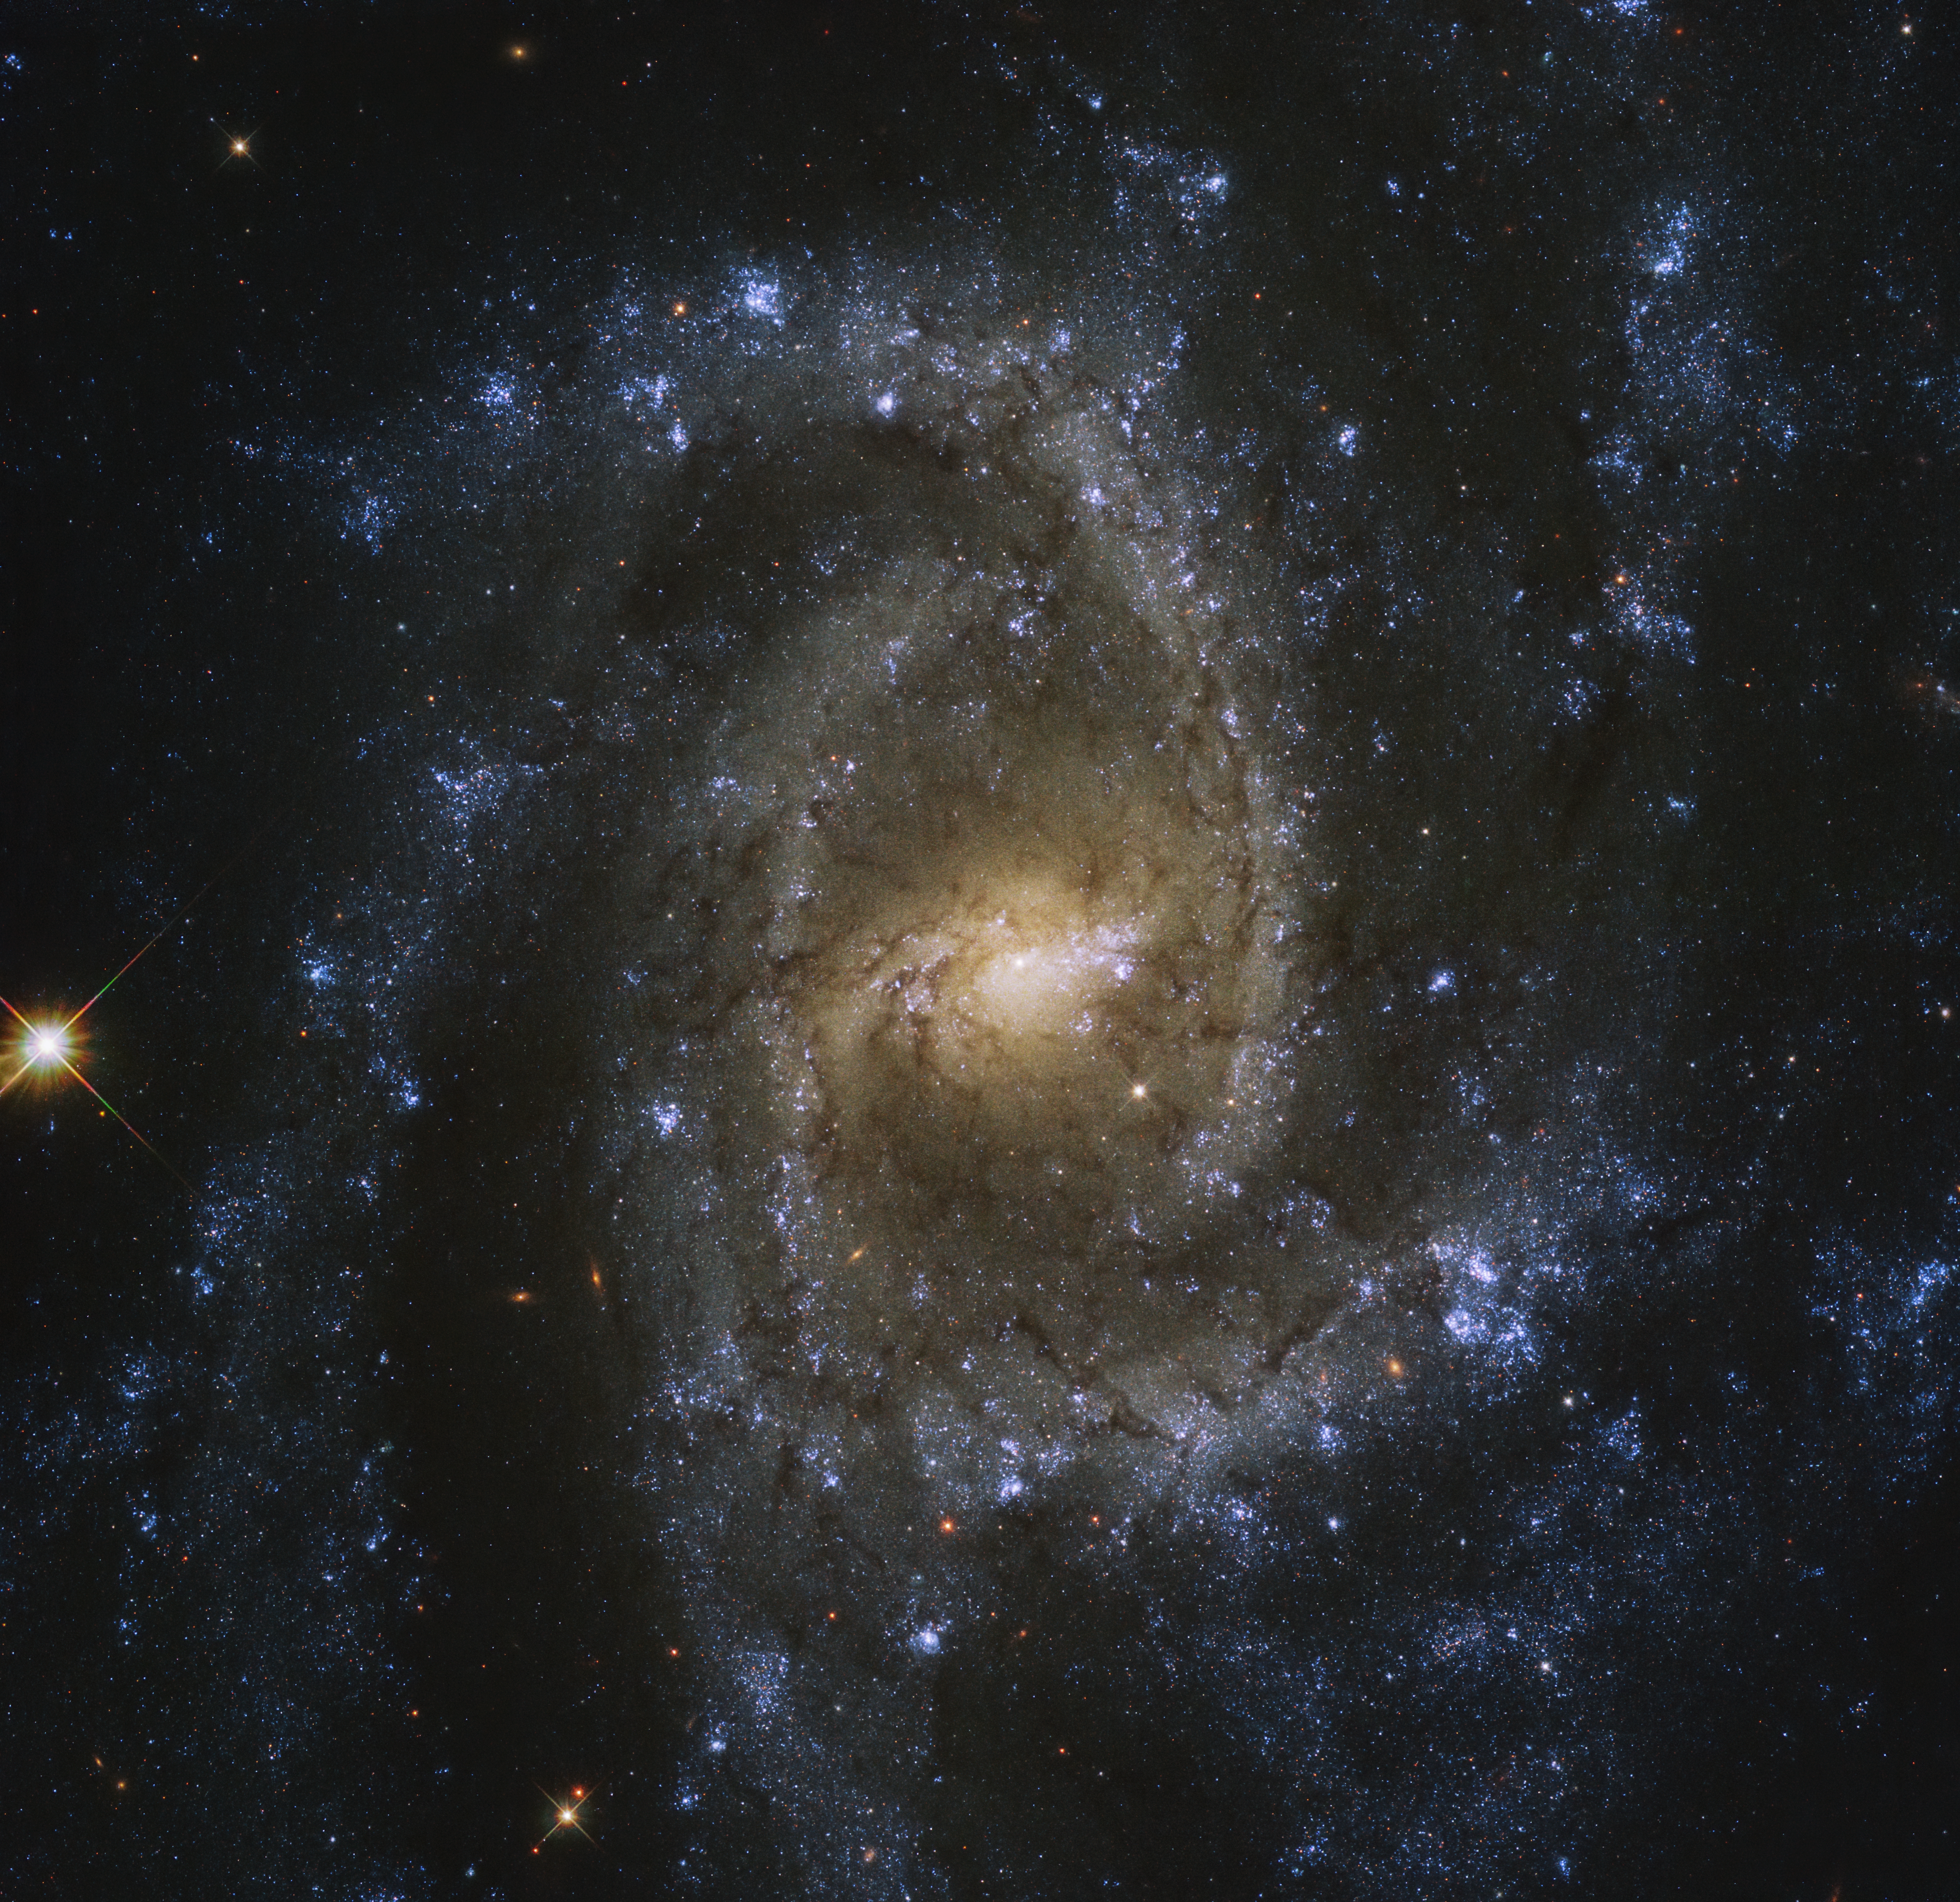

Eye of the Serpent

The twisting patterns created by the multiple spiral arms of NGC 2835 create the illusion of an eye. This is a fitting description, as this magnificent galaxy resides near the head of the southern constellation of Hydra, the water snake. This stunning barred spiral galaxy, with a width of just over half that of the Milky Way, is brilliantly featured in this image taken by the NASA/ESA Hubble Space Telescope. Although it cannot be seen in this image, a supermassive black hole with a mass millions of times that of our Sun is known to nestle in the very centre of NGC 2835 .

This galaxy was imaged as part of PHANGS-HST, a large galaxy survey with Hubble that aims to study the connections between cold gas and young stars in a variety of galaxies in the local Universe. Within NGC 2835, this cold, dense gas produces large numbers of young stars within large star formation regions. The bright blue areas, commonly observed in the outer spiral arms of many galaxies, show where near-ultraviolet light is being emitted more strongly , indicating recent or ongoing star formation.

Expected to image over 100 000 gas clouds and star-forming regions outside our Milky Way, this survey hopes to uncover and clarify many of the links between cold gas clouds, star formation and the overall shape and morphology of galaxies. This initiative is a collaboration with the international Atacama Large Millimeter/submillimeter Array (ALMA) and the European Southern Observatory's Very Large Telescope's MUSE instrument, through the greater PHANGS program (PI: E. Schinnerer).

Credit: ESA/Hubble & NASA, J. Lee, and the PHANGS-HST Team Acknowledgement: Judy Schmidt (Geckzilla)